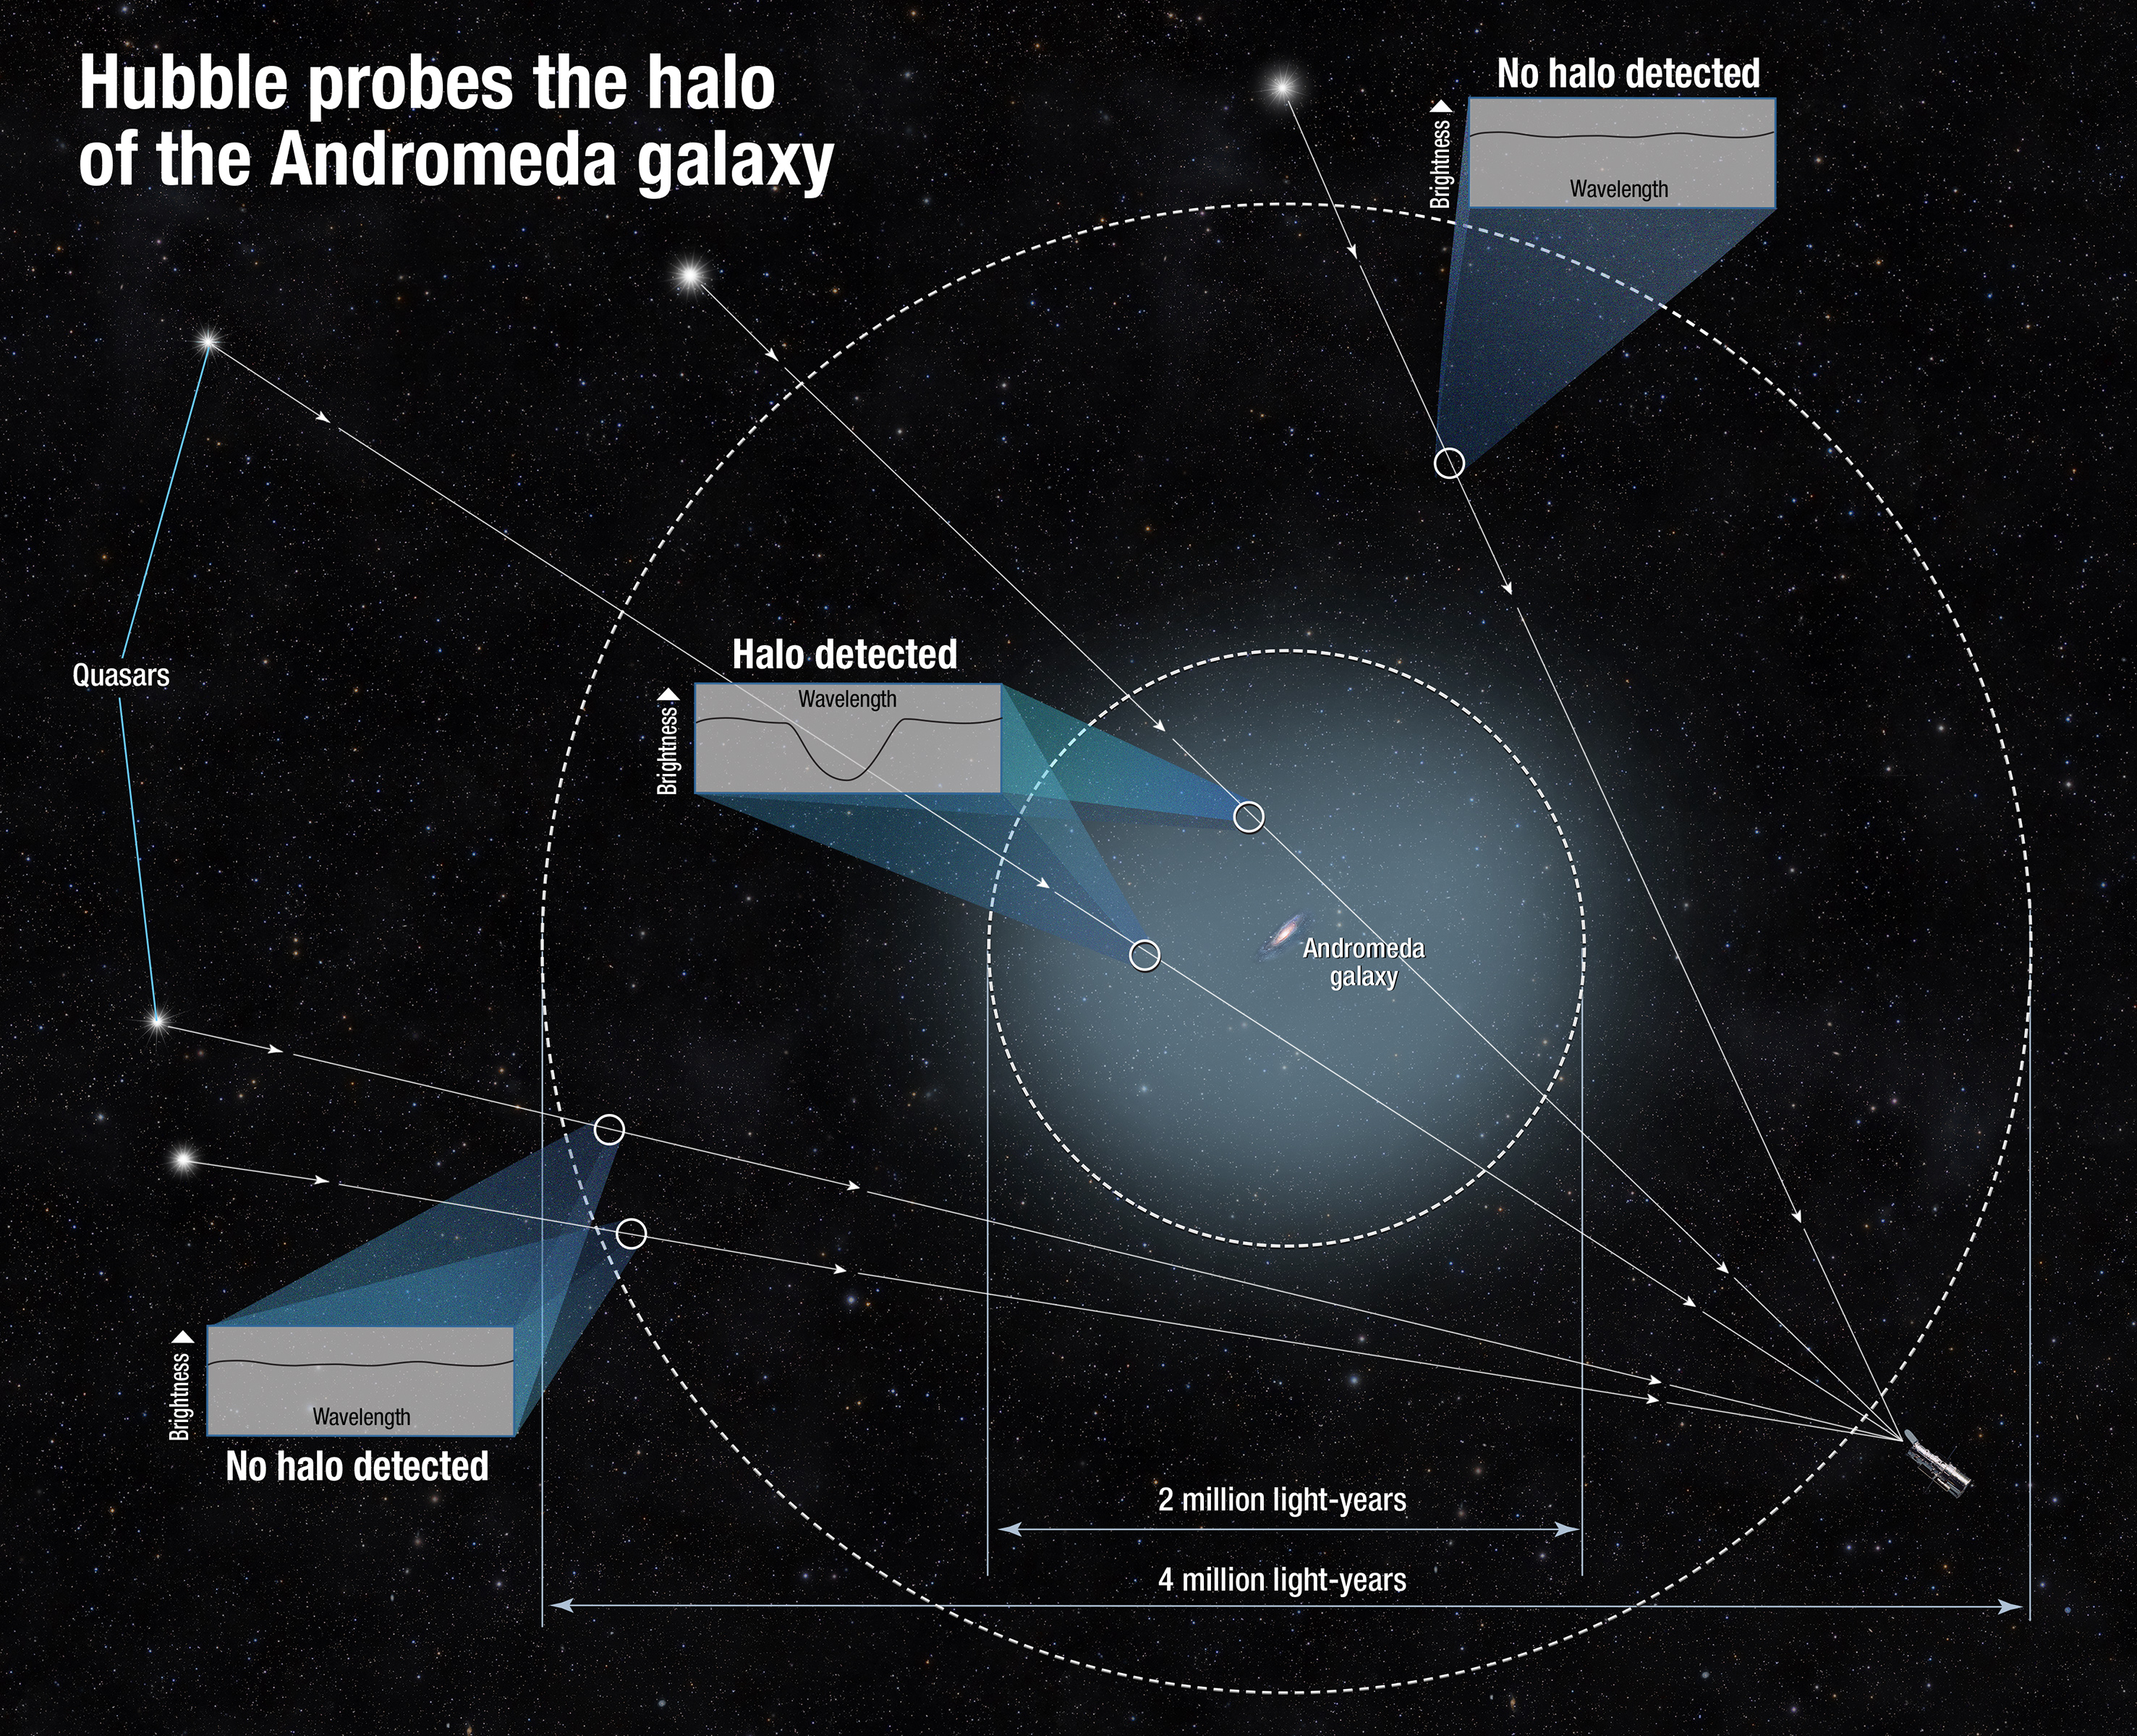

Hubble finds giant halo around the Andromeda Galaxy

This diagram shows how scientists determined the size of the halo of the Andromeda galaxy. Because the gas in the halo is dark, the team measured it by using the light from quasars, the very distant bright cores of active galaxies powered by black holes. They observed the quasars’ light as it traveled through the intervening gas. The halo’s gas absorbed some of that light and made the quasar appear darker in a very small wavelength range. By measuring the tiny dip in brightness at that specific range, scientists could tell how much gas is between us and each quasar. Some quasars showed no dip in brightness, and this helped define the size of the halo.

Credit: NASA, ESA, and A. Feild (STScI)